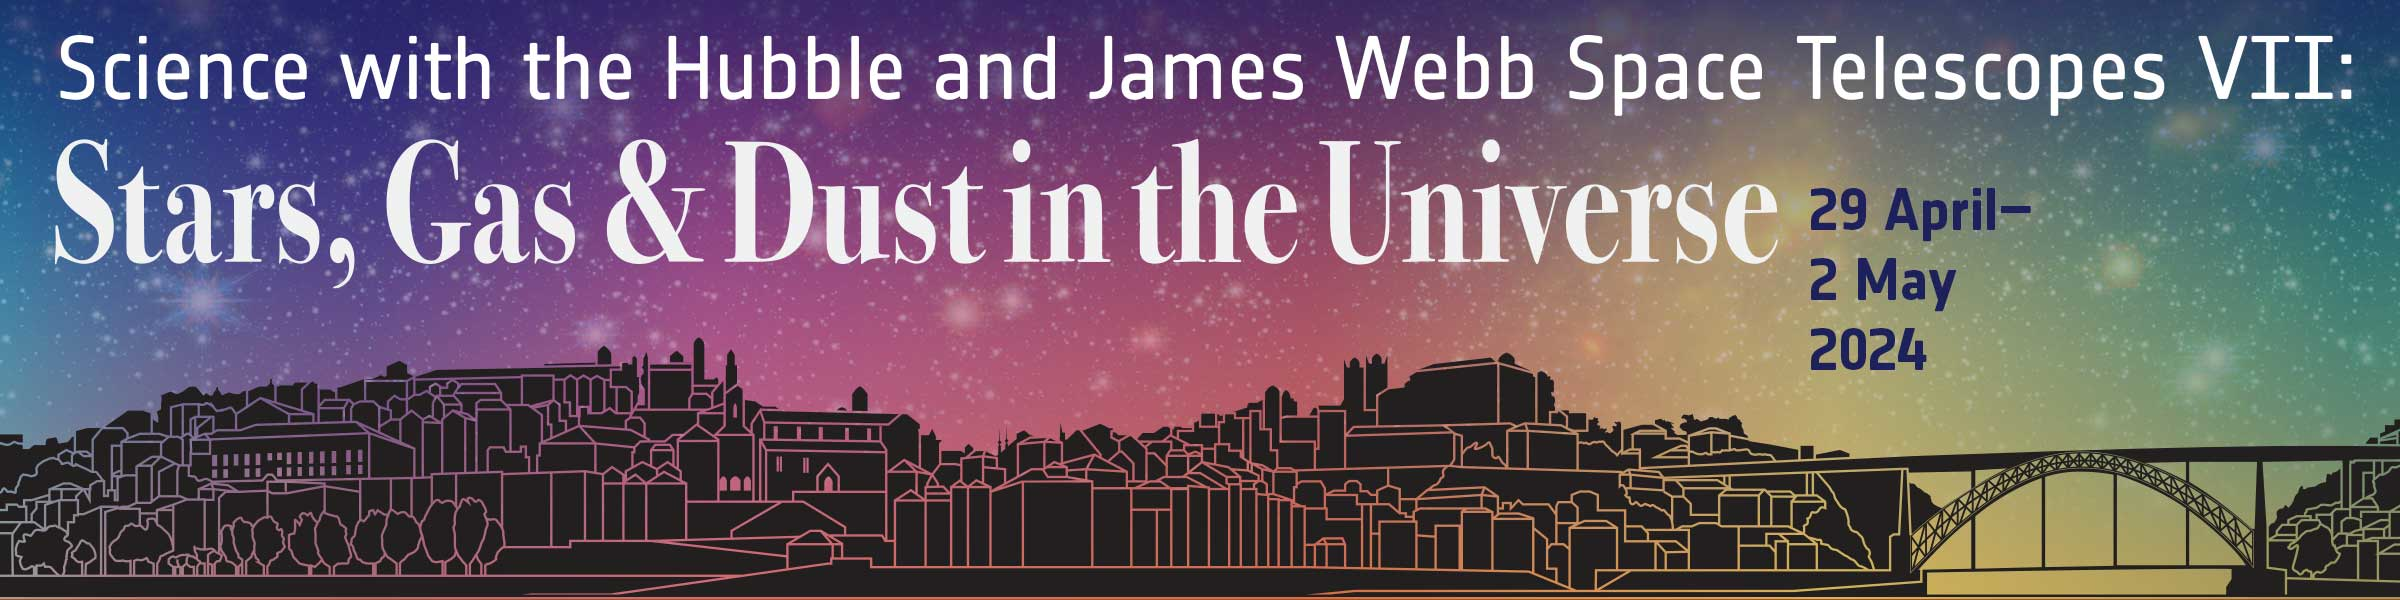

Banner for the “Stars, Gas & Dust in the Universe” Conference

This image shows the banner for the “Stars, Gas & Dust in the Universe” conference. This is the latest in a series of ESA-sponsored conferences, in collaboration with STScI, which highlight science with the Hubble and James Webb Space Telescopes. The event will be held in Porto, Portugal from 29 April to 2 May 2024, in the week after the 34th anniversary of Hubble’s launch.

Credit: NASA & ESA